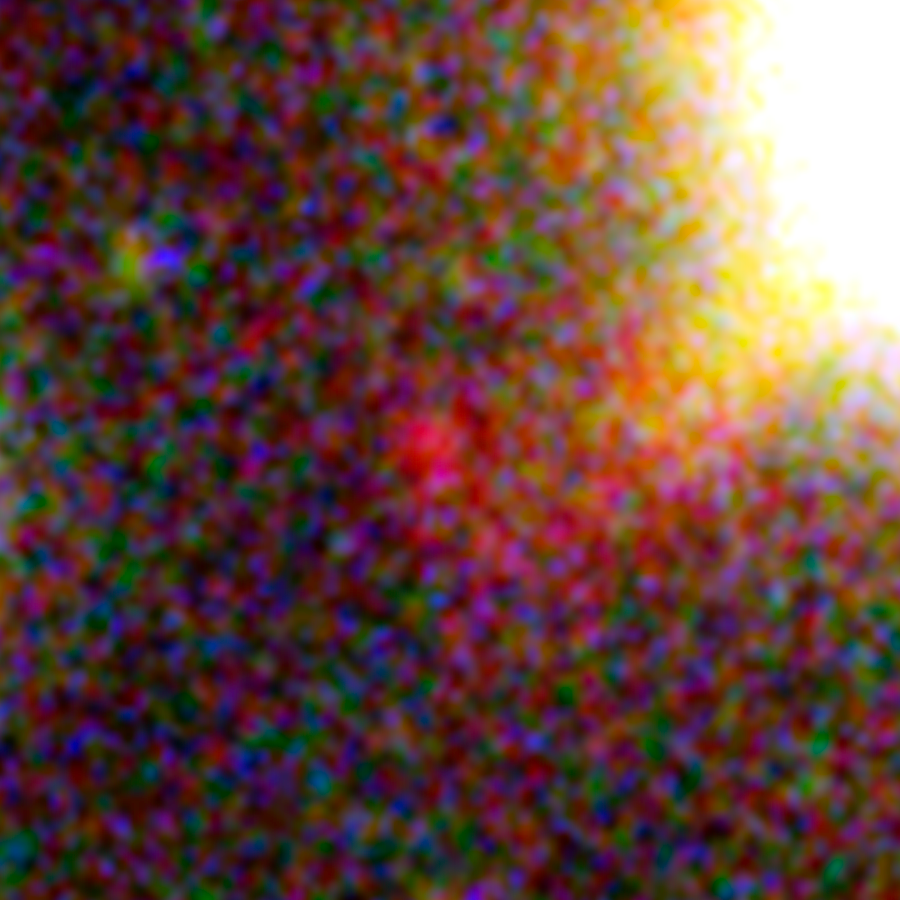

One of three magnified images of a distant galaxy (1)

This image, taken with the NASA/ESA Hubble Space Telescope, shows one of three images of the same very distant galaxy whose light has taken 13 billion years to reach us. The galaxy has been magnified and multiply imaged by the lensing effect of the galaxy cluster Abell 2744.

By measuring the angular separations between the three magnified images of the galaxy a team of astronomers were able to further constrain their measurement of the galaxy’s distance from Earth. Much like using your camera to focus on an object, and then reading its distance from you on the lens focus ring.

This makes this possibly the most reliable distance measurement yet of an object that existed in the Universe’s formative years.

Credit: NASA, ESA Acknowledgement: A. Zitrin (California Institute of Technology, USA)